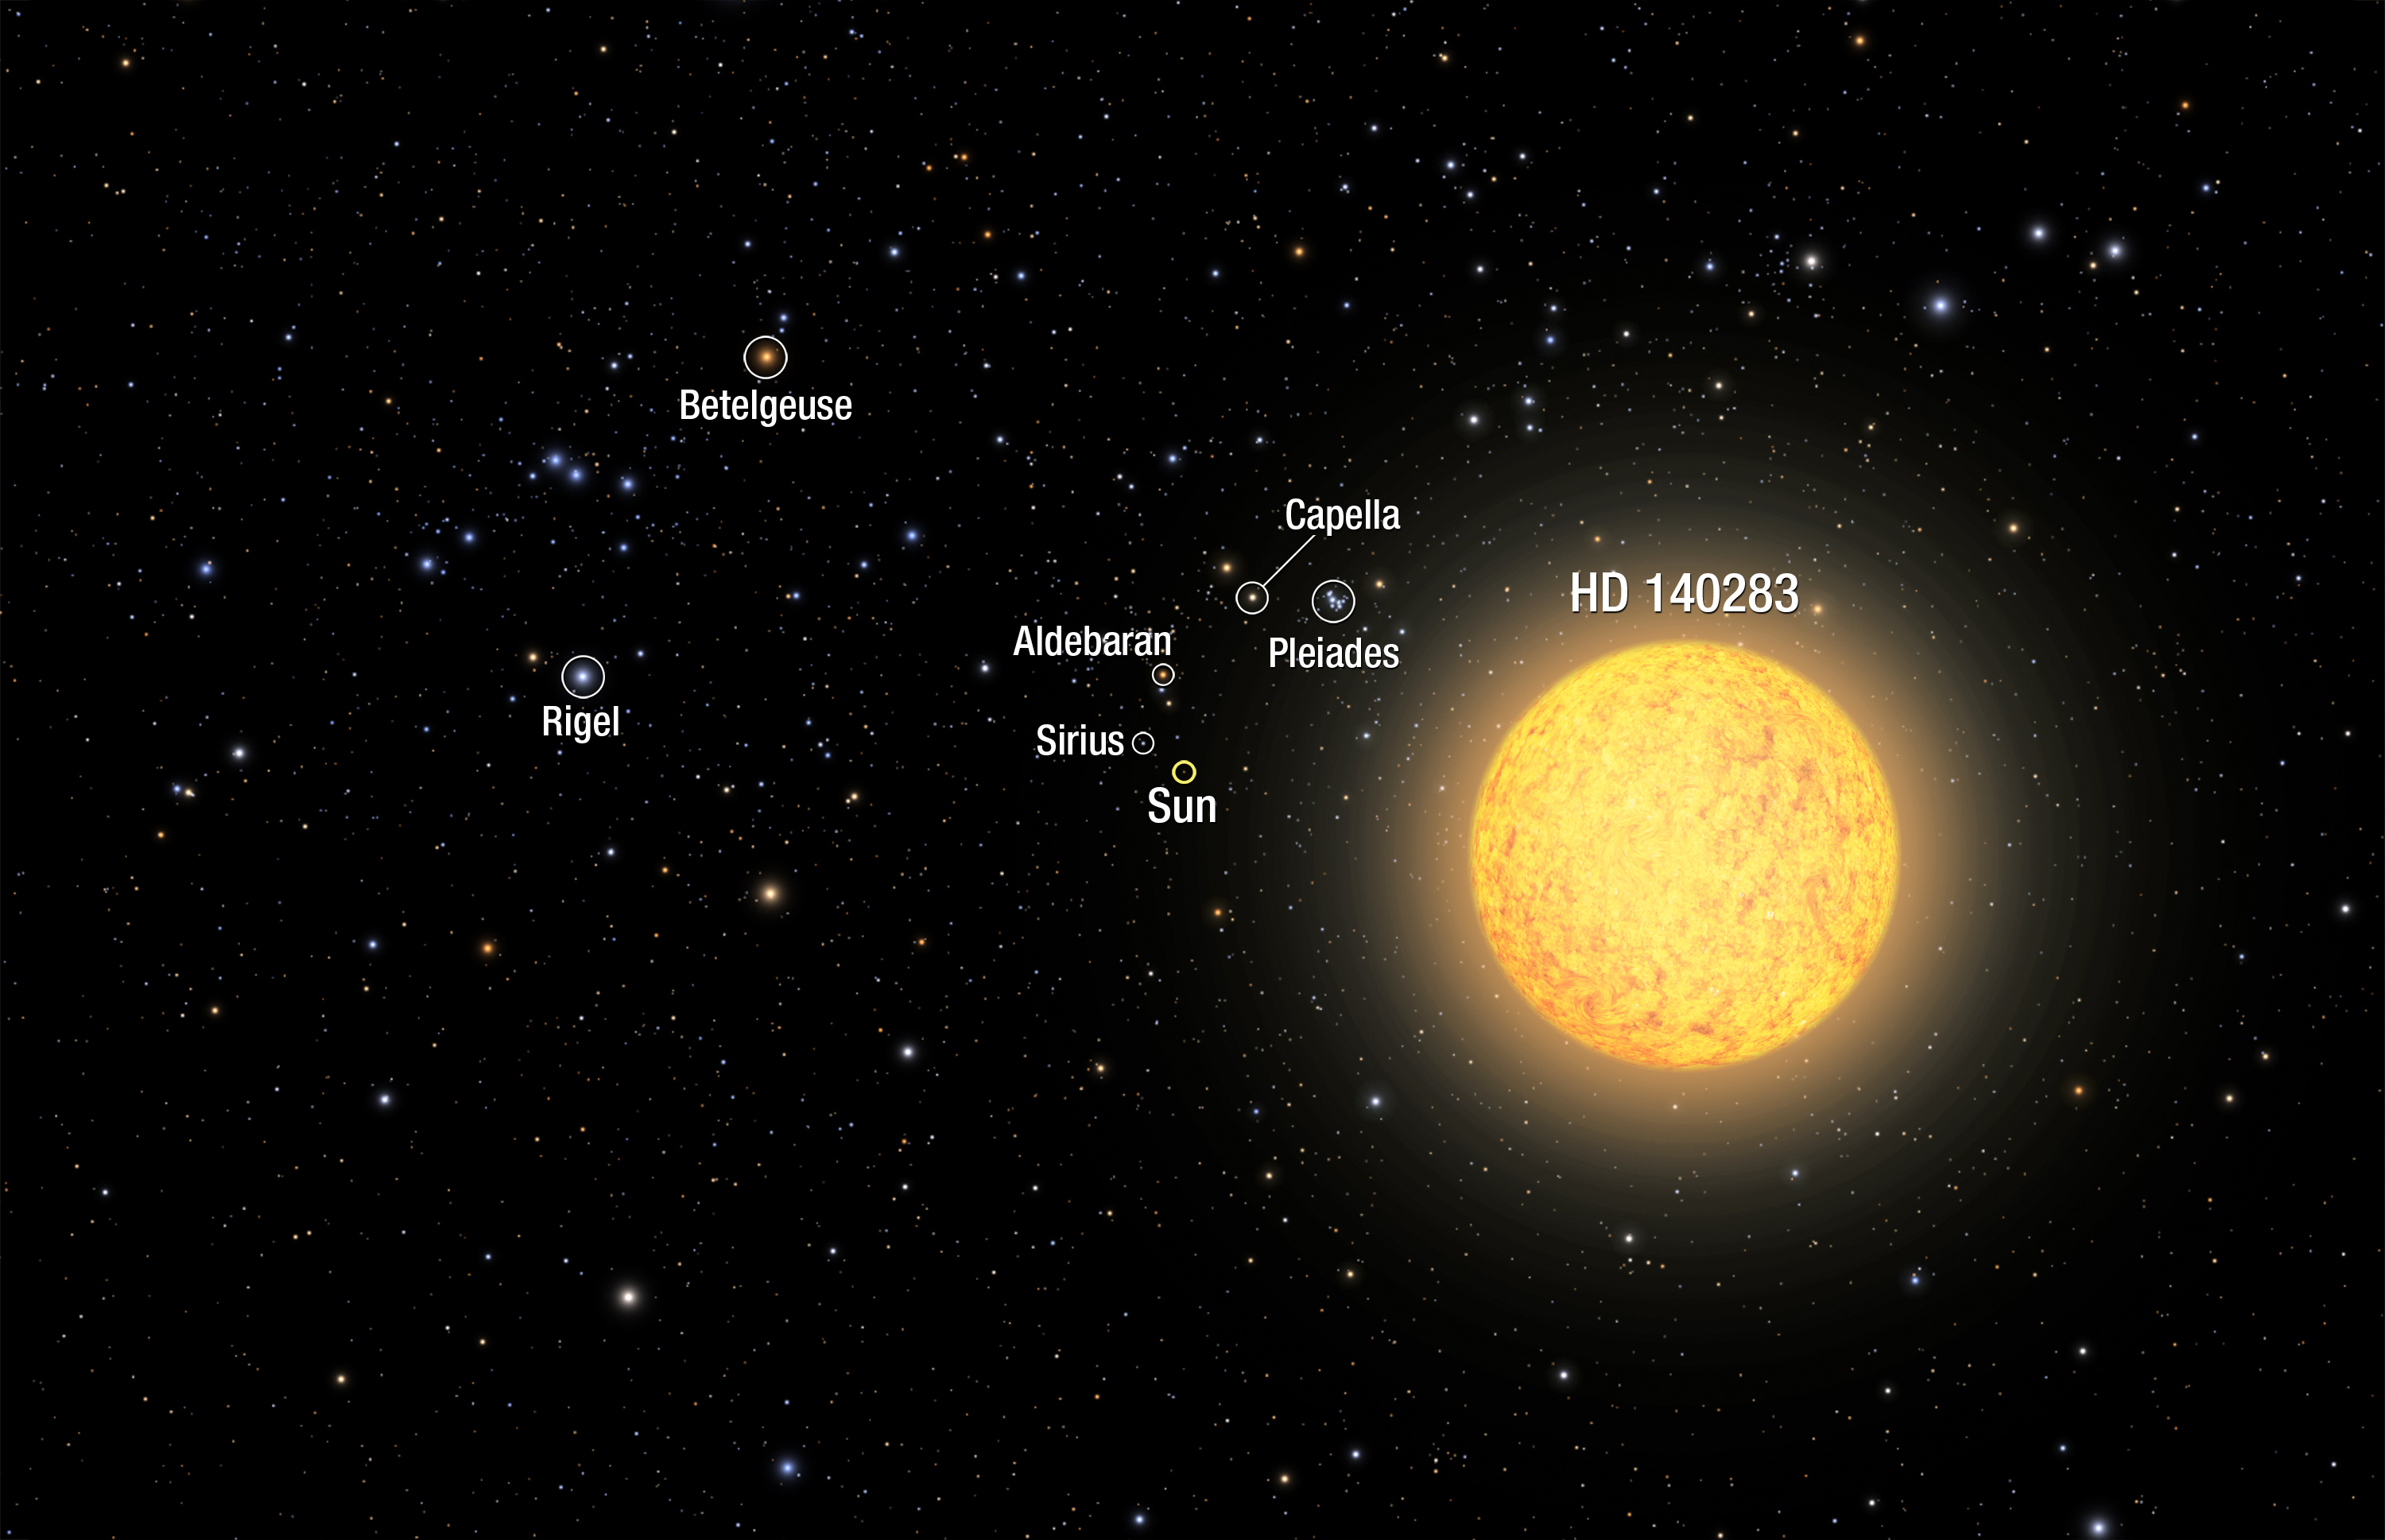

Artist’s view of ancient star (Annotated)

This is an illustration of the oldest star ever found in our solar neighborhood. The ageing star, catalogued as HD 140283, lies over 190 light-years from Earth. NASA/ESA Hubble Space Telescope observations narrowed the measurement uncertainty on the star's distance, and this helped to refine the calculation of a more precise age of 14.5 billion years (plus or minus 800 million years).

Because the ageing star is relatively nearby, familiar stars and constellations as seen from Earth are visible in the surrounding sky, but in different locations. In the upper left is the constellation of Orion (The Hunter), which looks distorted from our new perspective in space. Just to the upper left of the foreground star is the Pleiades cluster. To the lower left of the cluster, our Sun has dimmed to an apparent magnitude of +7, placing it below naked-eye visibility.

Credit: NASA, ESA, A. Feild and F. Summers (STScI)